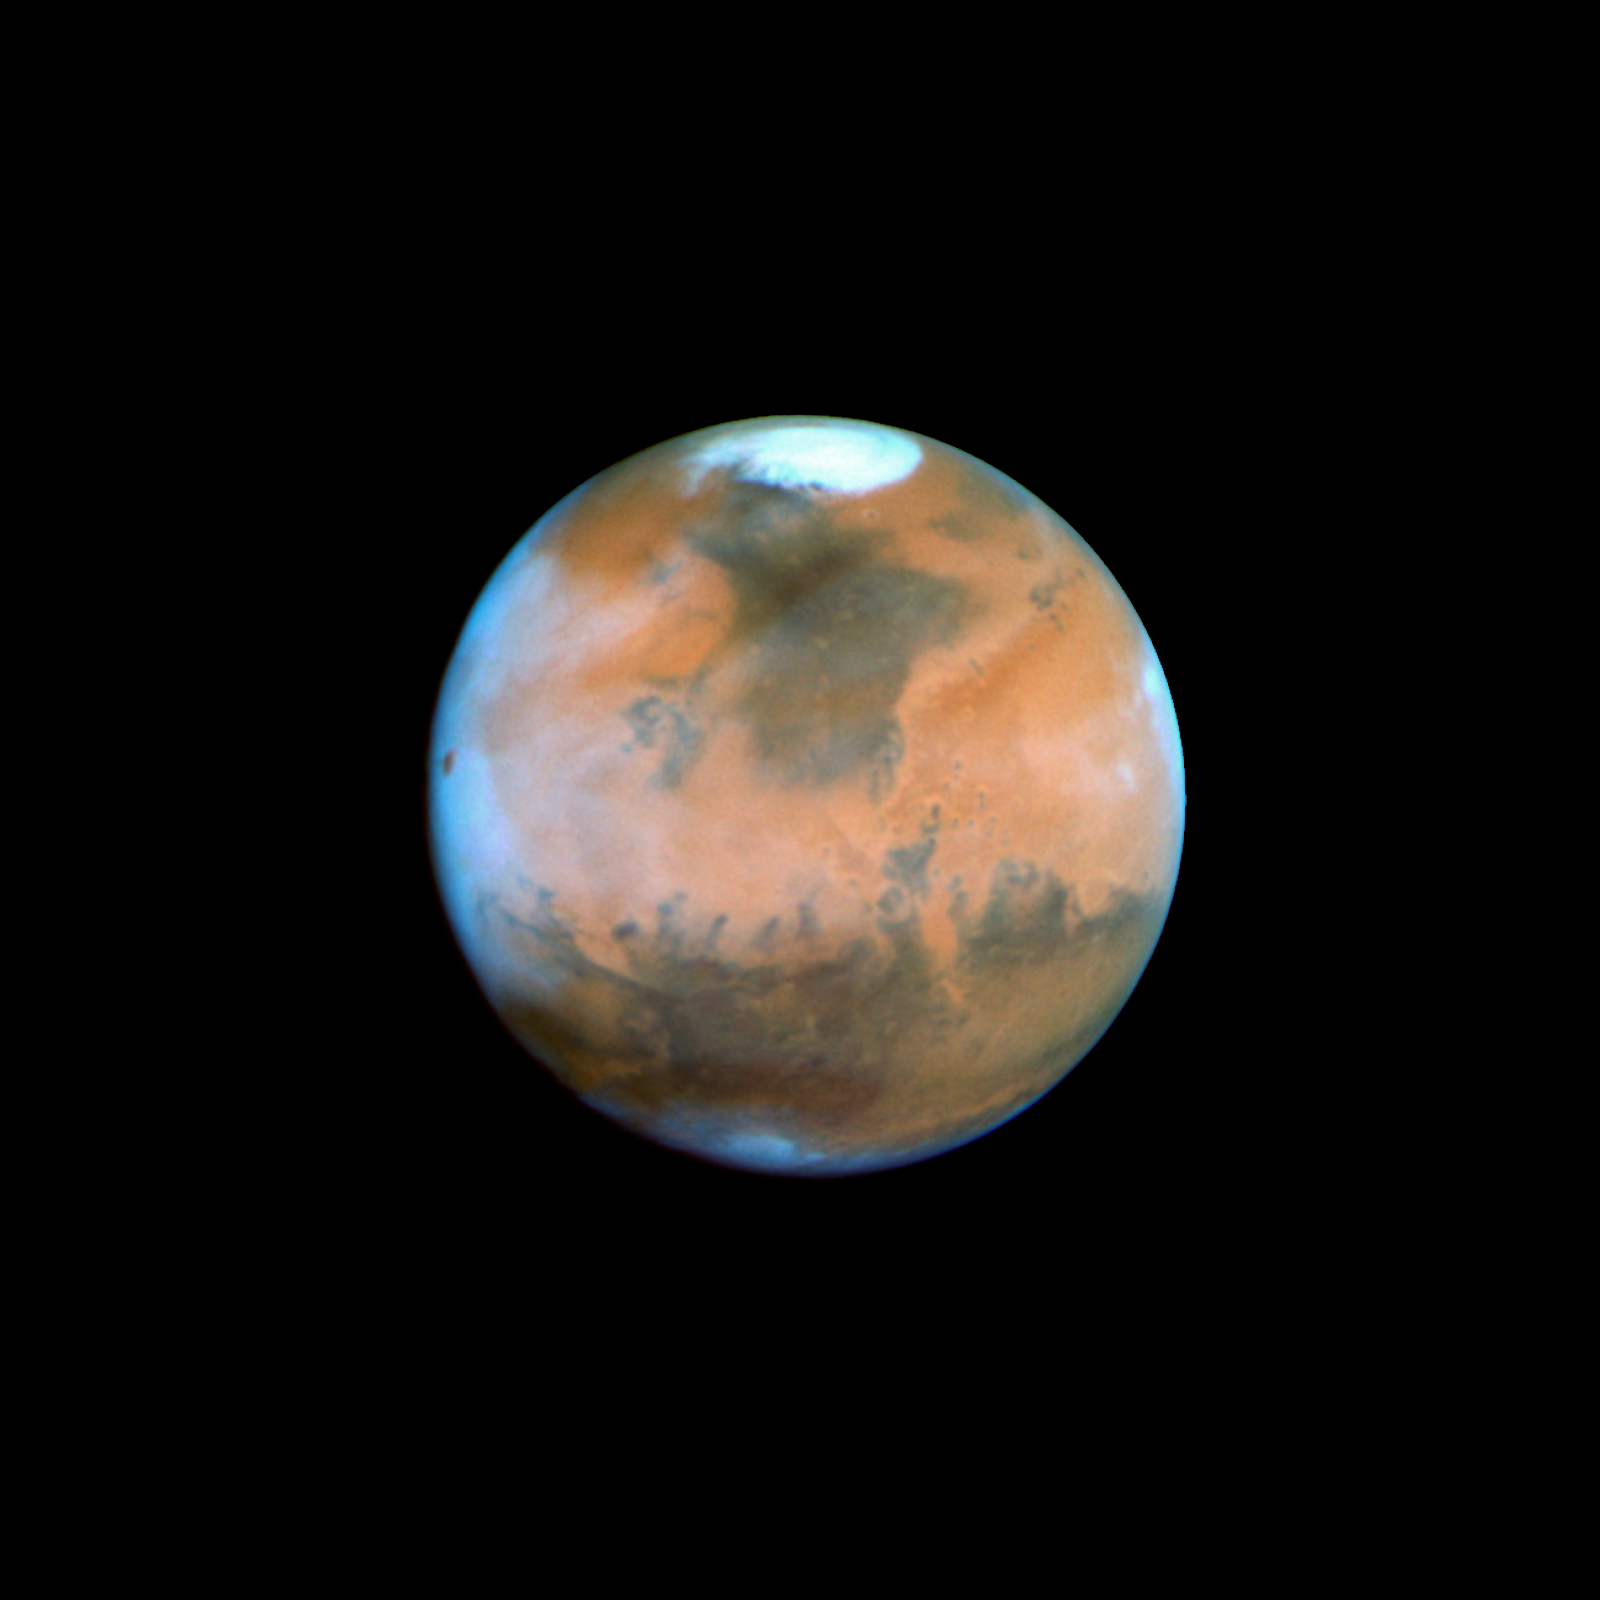

Mars Near Opposition 1995-2005: 1995

NASA's Hubble Space Telescope snapped this picture of Mars on October 28, within a day of its closest approach to Earth on the night of October 29. The large regional dust storm appears as the brighter, redder cloudy region in the middle of the planet's disk.

Credit: NASA, ESA, and The Hubble Heritage Team (STScI/AURA)